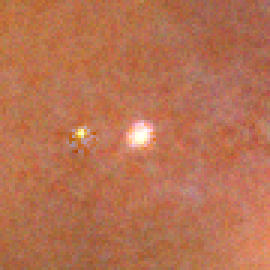

Closeup of Proplyd in Trifid Nebula

The Trifid Nebula, also known as Messier 20 and NGC 6514, lies within our own Milky Way Galaxy about 9,000 light-years (2,700 parsecs) from Earth, in the constellation Sagittarius.

Credit: NASA, ESA, and The Hubble Heritage Team (AURA/STScI)